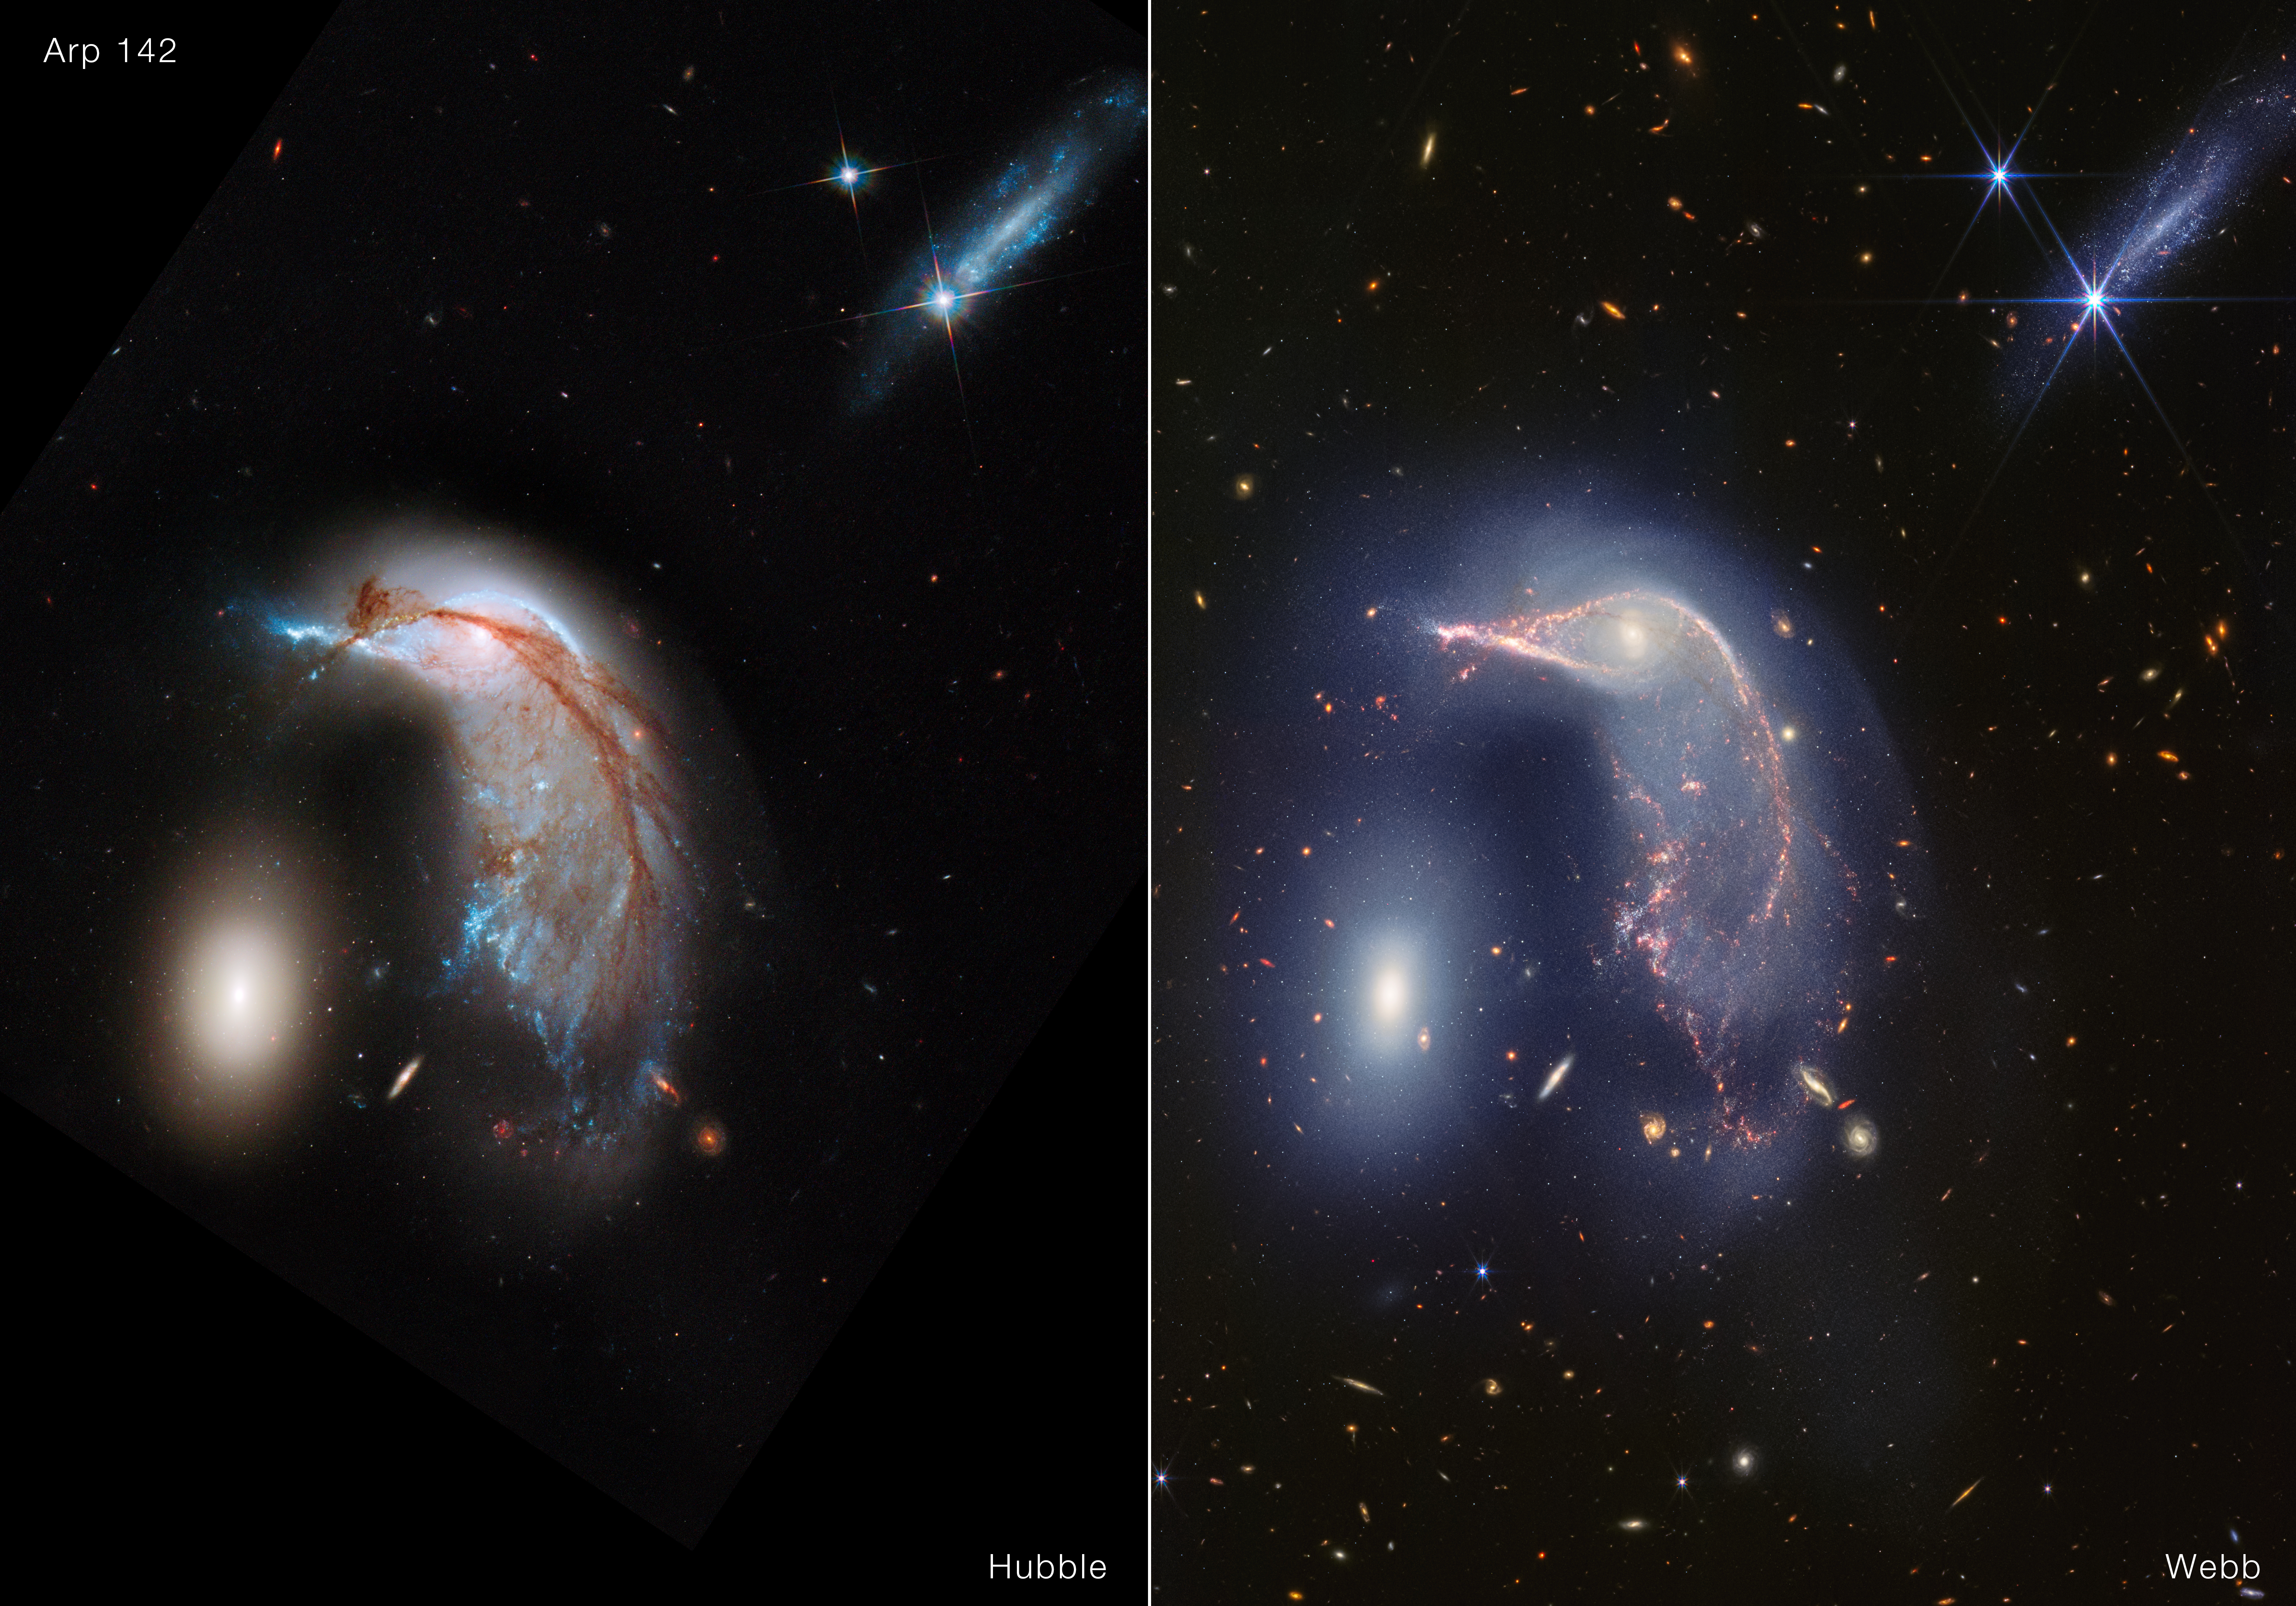

Interacting galaxies Arp 142 (Hubble and Webb image)

This image shows two views of Arp 142 (nicknamed the Penguin and the Egg). The image on the left from the NASA/ESA Hubble Space Telescope shows the target in 2013. On the right is the NASA/ESA/CSA James Webb Space Telescope’s view of the same region in near-infrared light with the NIRCam instrument.

Both images are made up of several filters. The process of applying colour to Webb’s images is remarkably similar to the approach used for Hubble: the shortest wavelengths are assigned blue and the longest wavelengths are assigned red. For Webb, image processors translate near-infrared light images, in order, to visible colours. Both telescopes take high-resolution images, so there are many features to explore.

In Hubble’s visible light image, a dark brown dust lane begins across the Penguin’s ‘beak’ and extends through its body and along its back. In Webb’s near-infrared view, this dust lane is significantly fainter.

Linger on Webb’s image. A faint upside-down U shape joins the pair of galaxies. This is a combination of stars, gas, and dust that continues to mix as the galaxies mingle. In Hubble’s view, notice there is a clearer gap between the Penguin’s ‘beak’ and the top of the Egg. Toward the bottom of the Penguin’s tail are several prominent spiral galaxies, though there are a few more in Webb’s image.

The Egg itself looks similar in both images, but in Webb’s view, the galaxy shines so brightly that it causes diffraction spikes to slightly extend its gleam. The galaxy at top right appears about the same size, but many more pinpricks of stars appear in Webb’s view.

Now compare the backgrounds. Hubble shows many distant galaxies in visible light, though areas in the corners that are completely black were outside the telescope’s field of view. Many more distant galaxies gleam in Webb’s infrared image. This is a testament to the sensitivity and resolution of Webb’s near-infrared camera, and the advantages of infrared light. Light from distant galaxies is stretched as it travels across the Universe, so a significant portion of their light can only be detected at longer wavelengths.

Explore Webb’s near- and mid-infrared light image and its mid-infrared light-only image.

Credit: NASA, ESA, CSA, STScI